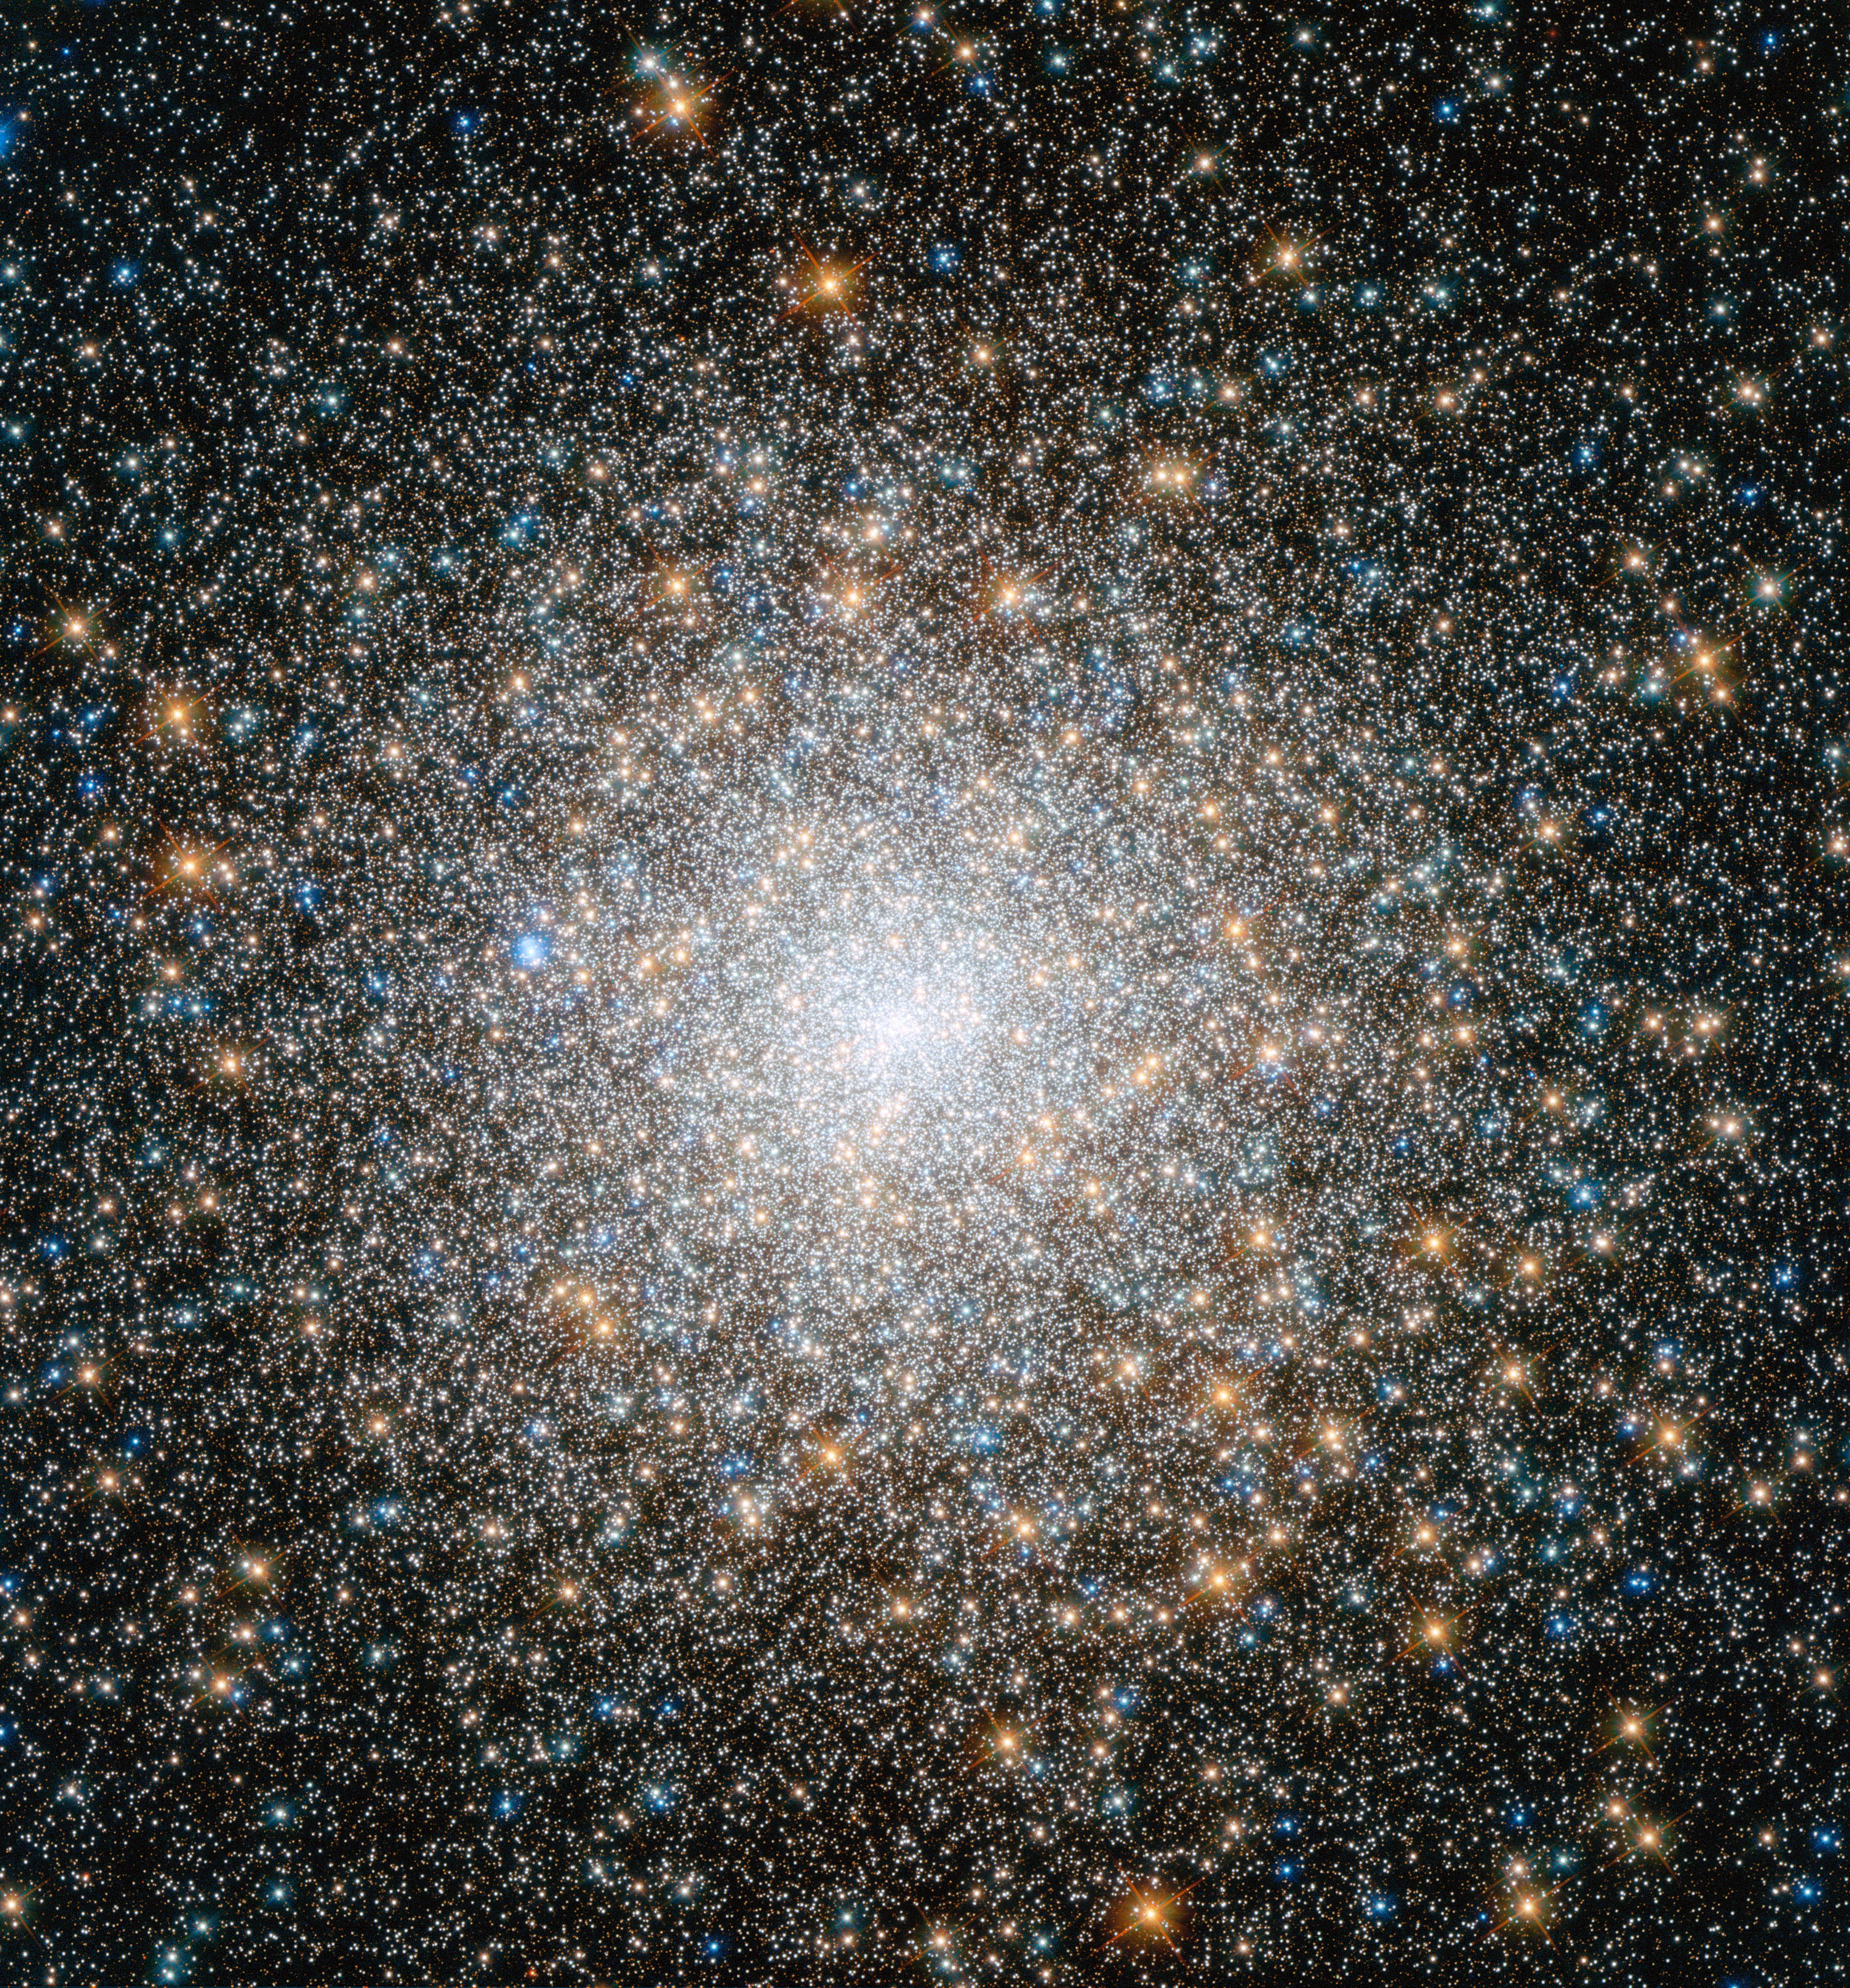

New Hubble image of star cluster Messier 15

This cluster of stars is known as Messier 15, and is located some 35 000 light-years away in the constellation of Pegasus (The Winged Horse). It is one of the oldest globular clusters known, with an age of around 12 billion years.

Both very hot blue stars and cooler golden stars can be seen swarming together in the image, becoming more concentrated towards the cluster's bright centre. Messier 15 is one of the densest globular clusters known, with most of its mass concentrated at its core. As well as stars, Messier 15 was the first cluster known to host a planetary nebula, and it has been found to have a rare type of black hole at its centre.

This new image is made up of observations from Hubble's Wide Field Camera 3 and Advanced Camera for Surveys in the ultraviolet, infrared, and optical parts of the spectrum.

Credit: NASA, ESA